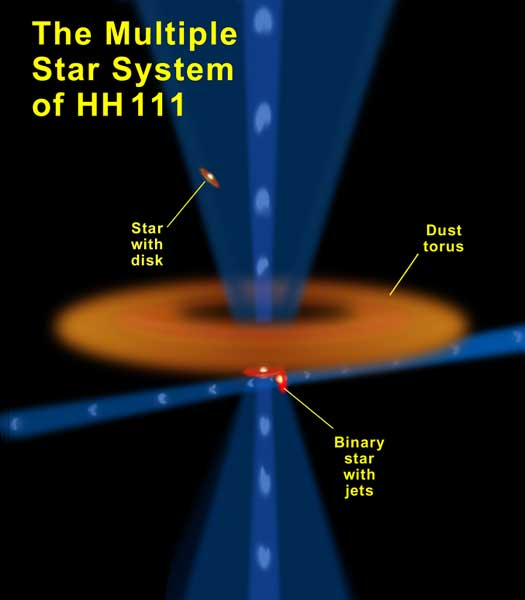

The multiple star system of HH 111

A trio of newborn stars, 1,400 light-years away are taking part in a complex dance, as revealed by recent NASA Hubble Space Telescope (HST) observations. As shown in this diagram, two are now closely embracing each other, while the third has parted from their company. These stars are located near a huge torus, or donut, of gas and dust from which they formed.

Credit: NASA/ESA